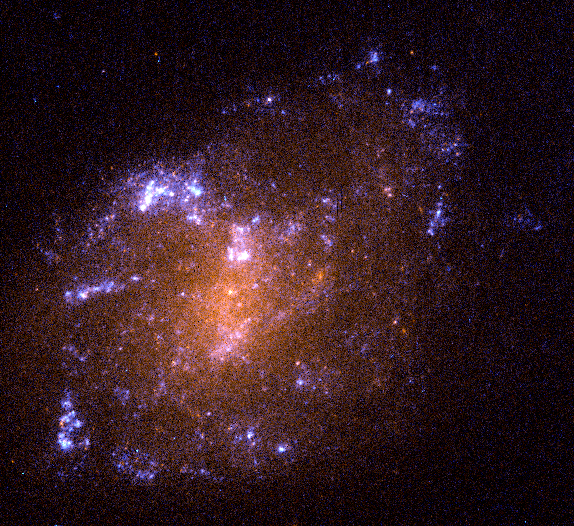

Spiral Galaxy ESO 0418-008

This image is an example of a tiny, youthful spiral galaxy. ESO 418-008 is representative of the myriad of dwarf galaxies astronomers have seen in deep surveys. These galaxies are much smaller than typical ones like our Milky Way.

Credit: Rogier Windhorst (Arizona State University, Tempe, AZ), the Hubble mid-UV team and NASA/ESA